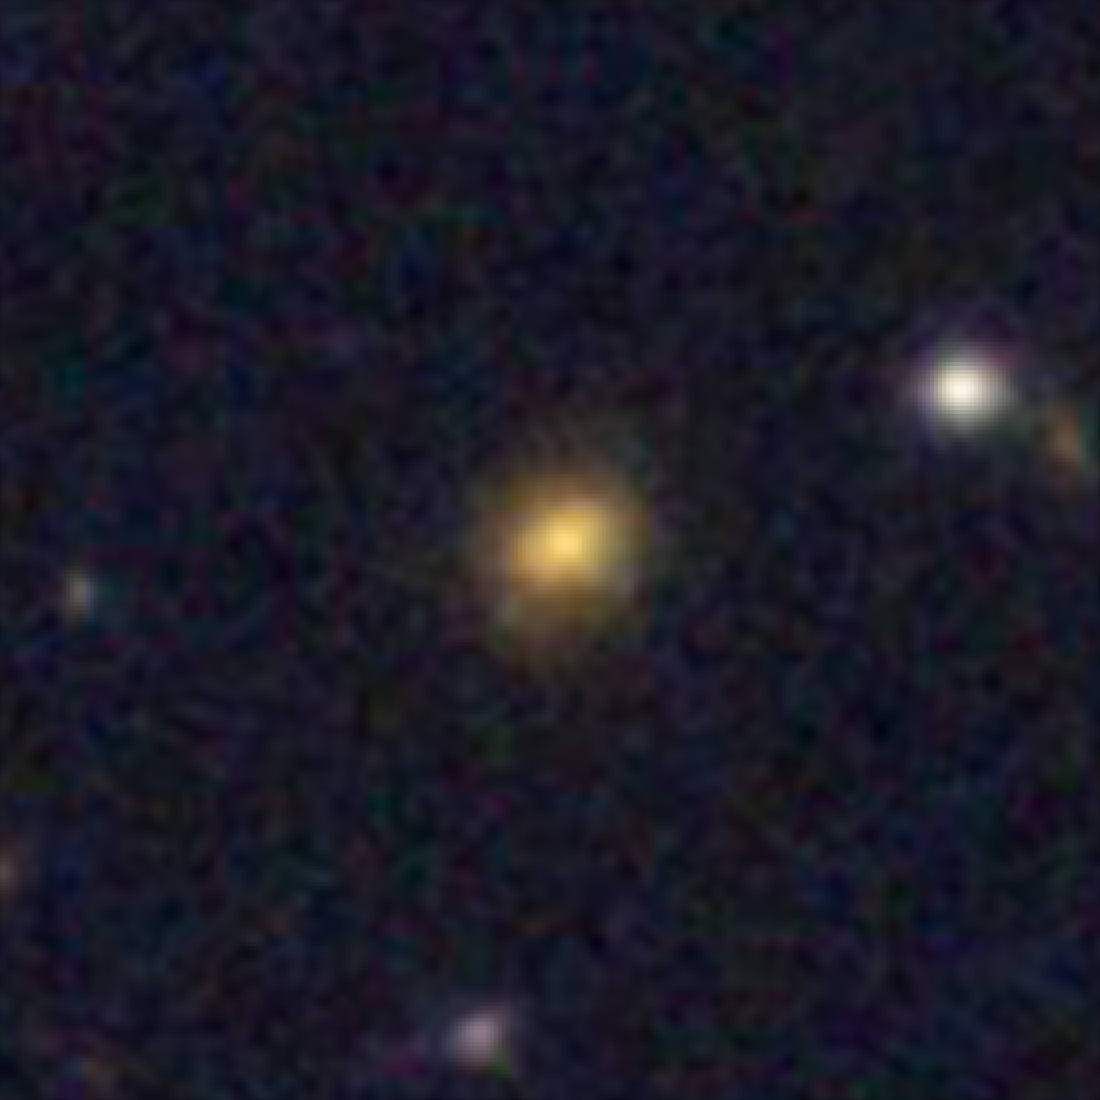

Hubble galaxy at redshift z = 2.0

This image, taken by the NASA/ESA Hubble Space Telescope, shows a galaxy similar in mass to the Milky Way. The galaxy is seen as it was 10.3 billion years ago.

Credit: NASA, ESA, C. Papovich (Texas A&M University), H. Ferguson (STScI), S. Faber (University of California, Santa Cruz), and I. Labbé (Leiden University)